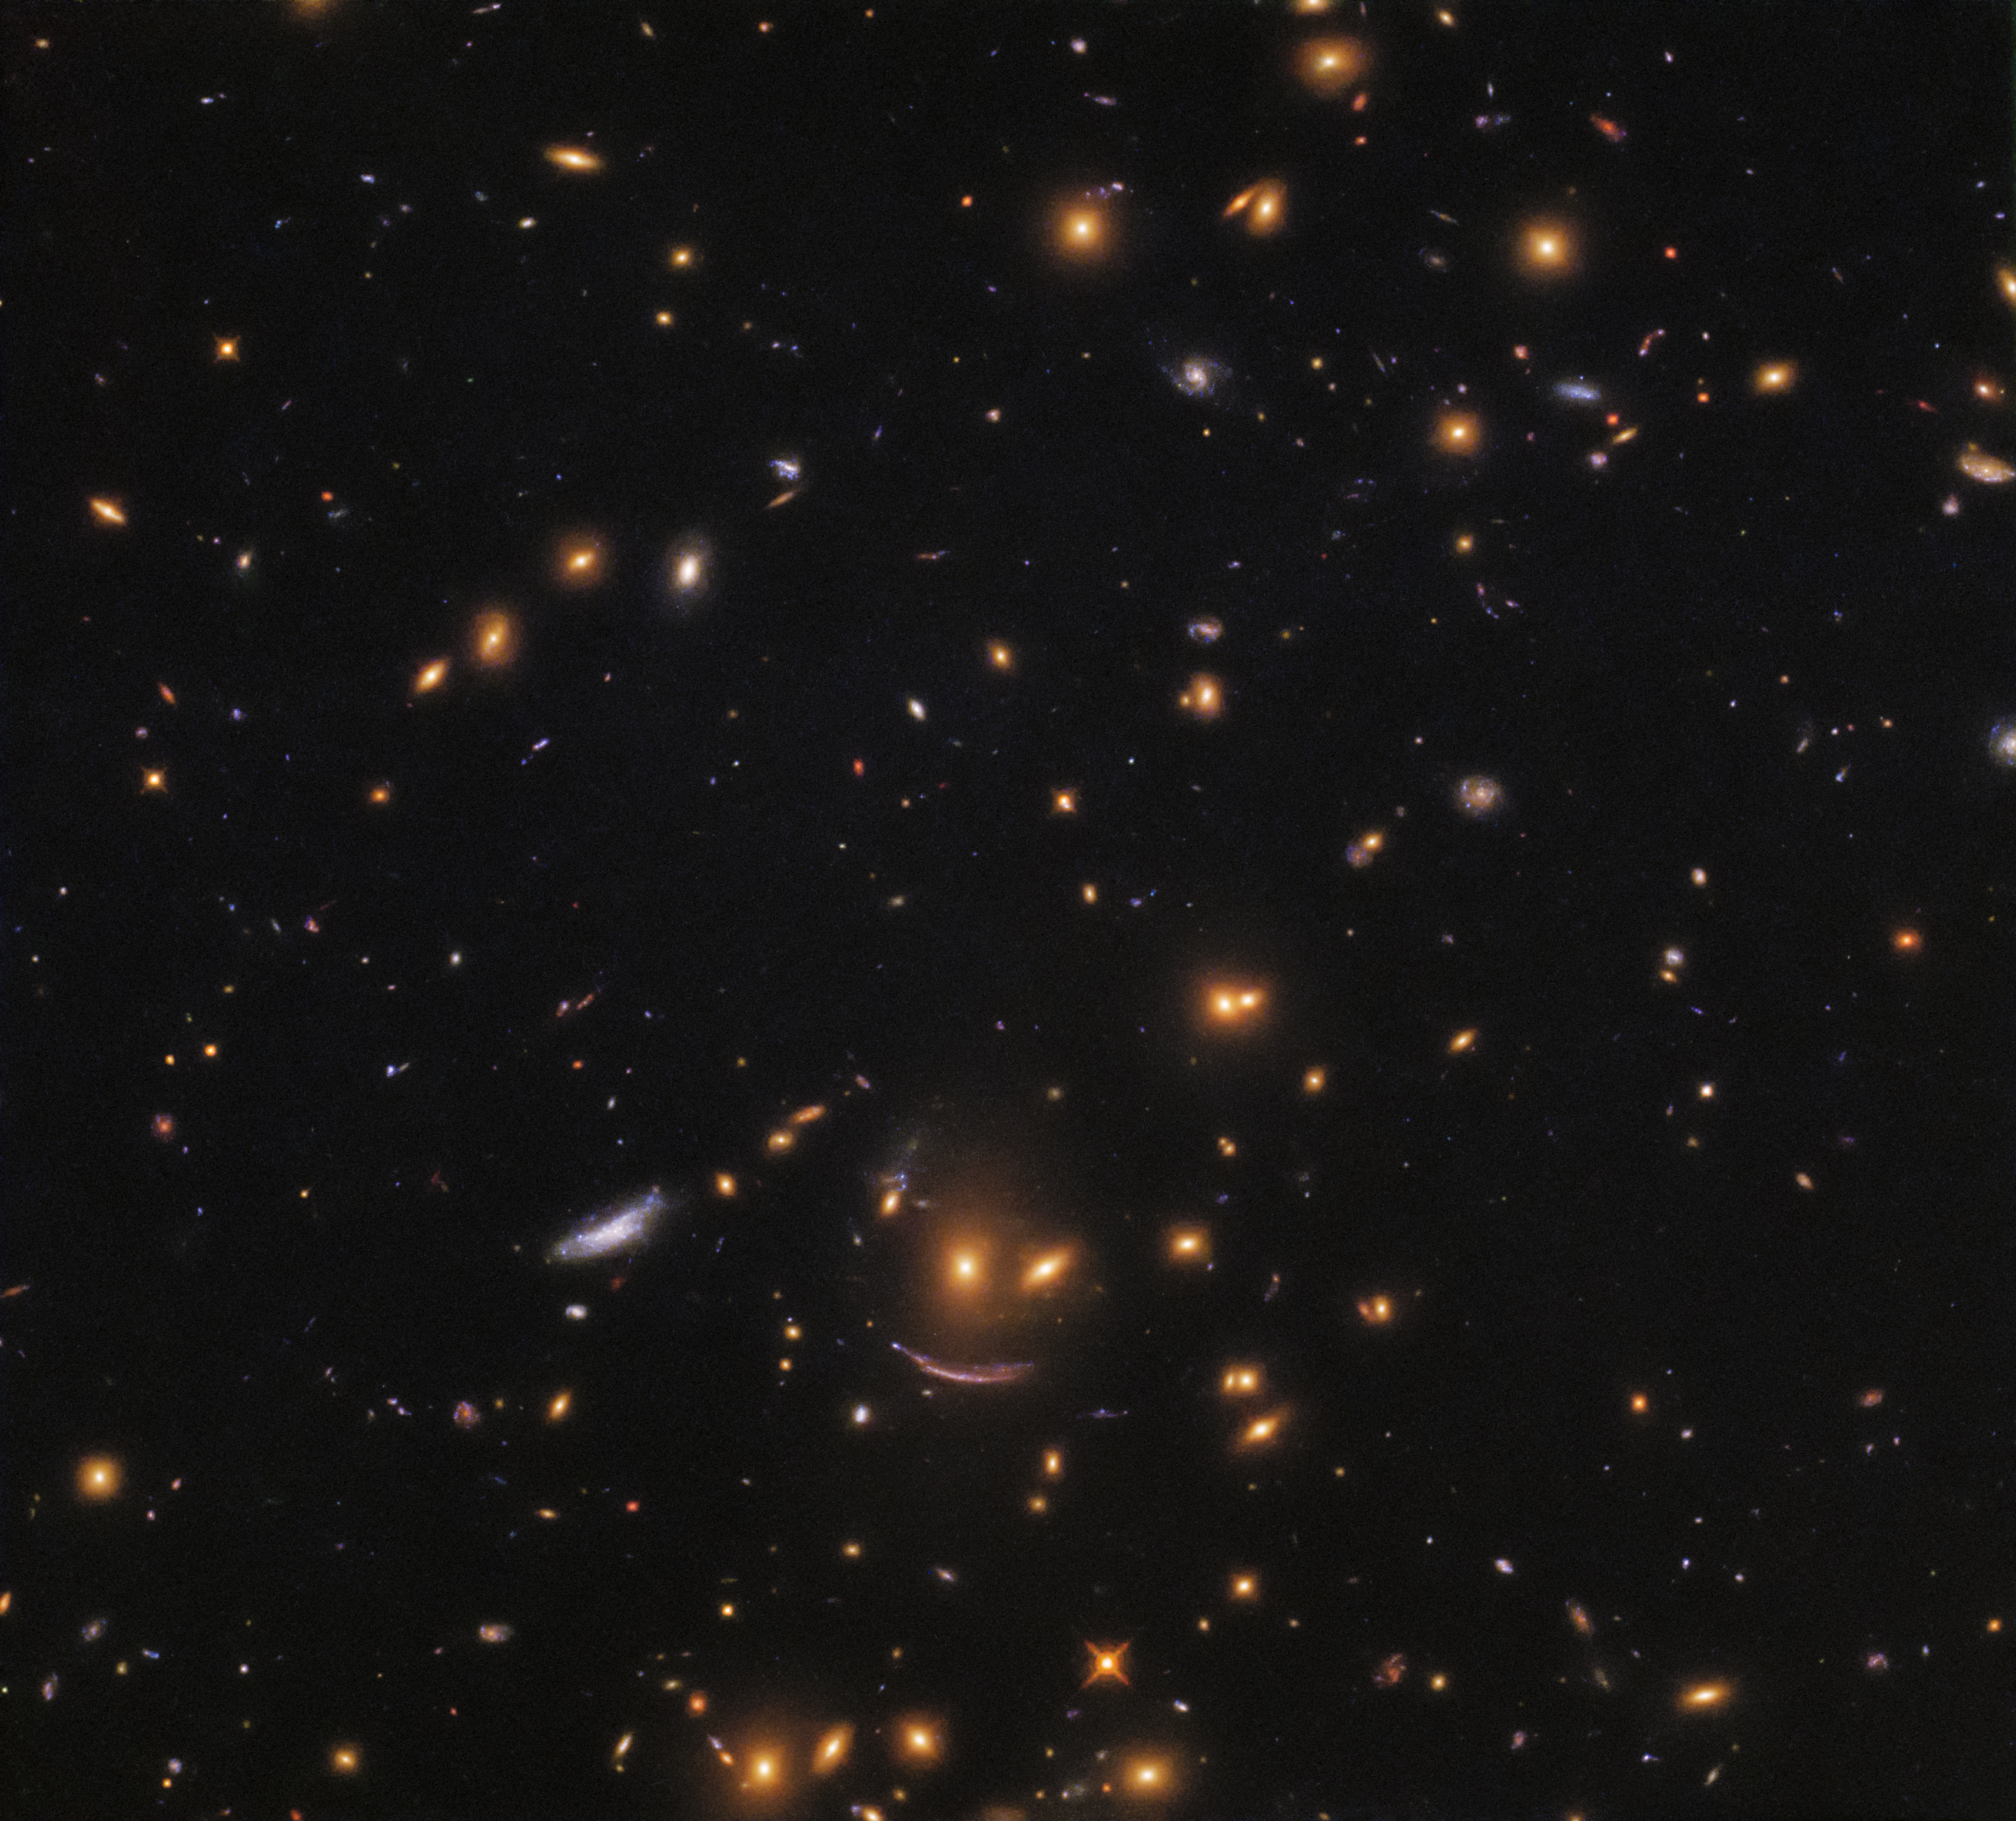

On the hunt for newborn stars

This image, taken with the NASA/ESA Hubble Space Telescope's Wide Field Camera 3 (WFC3), shows a patch of space filled with galaxies of all shapes, colours, and sizes. WFC3 is able to view many such galaxies at an unprecedented resolution — high enough to locate and study regions of star formation in a bid to understand how new stars spring to life throughout the cosmos.

Stars are born within giant clouds of gas. These massive clouds, or stellar nurseries, grow unstable and begin to collapse under gravity, becoming the seeds that will grow into new stars. By analysing the luminosity, size, and formation rate of different stellar nurseries, scientists hope to learn more about the processes that can lead to the formation of a newborn star. Studying nurseries within different galaxies will provide information about star formation at different points in time and space throughout the Universe.

Just below centre in this image is a formation of galaxies akin to a smiling face! Two yellow-hued blobs hang atop a sweeping arc of light, forming a celestial object known as SDSSJ0952+3434. The lower, arc-shaped galaxy has the characteristic shape of a galaxy that has been gravitationally lensed — its light has passed near to a massive object en route to us, causing it to become distorted and stretched out of shape.

Credit: ESA/Hubble & NASA
Acknowledgement: Judy Schmidt (geckzilla)